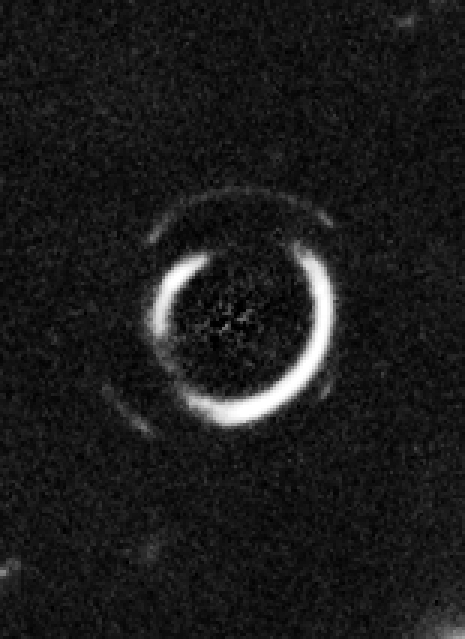

Close-up on double Einstein ring

This is a close-up of a gravitational lens showing two concentric partial ring-like structures after subtracting the glare of the central, foreground galaxy.

Credit: NASA, ESA, and R. Gavazzi and T. Treu (University of California, Santa Barbara)